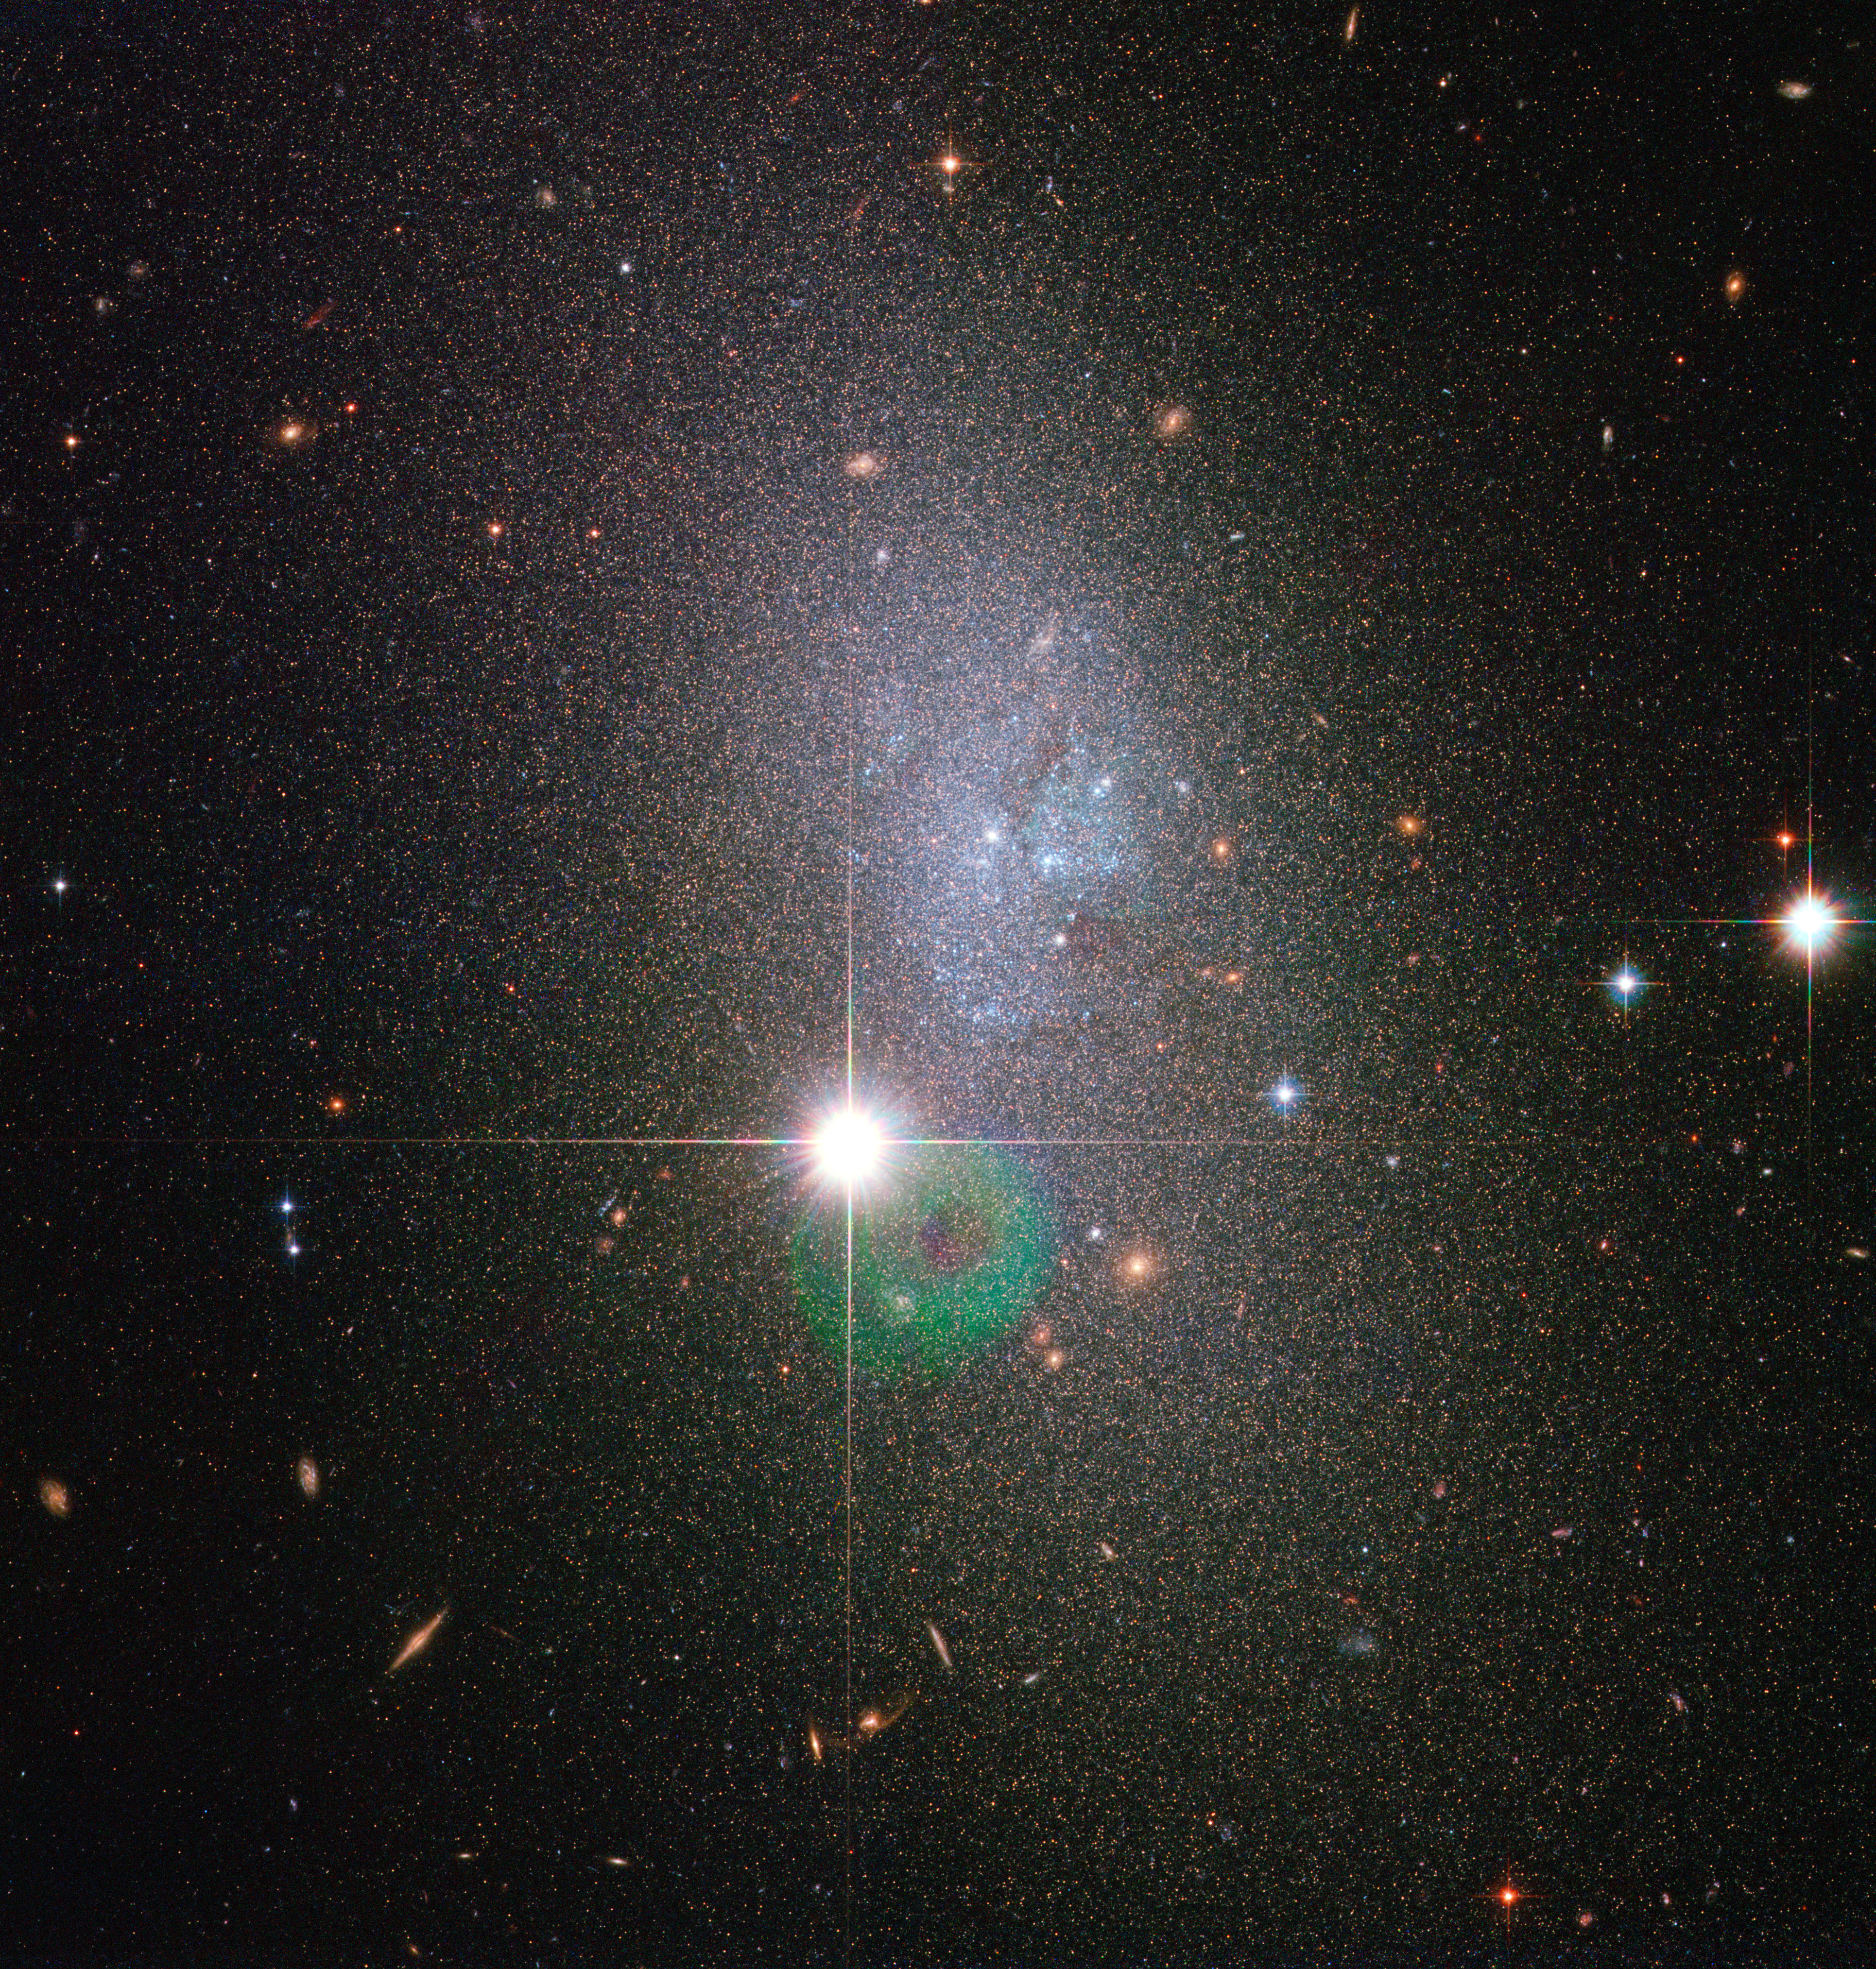

A vapour of stars

Relatively few galaxies possess the sweeping, luminous spiral arms or brightly glowing centre of our home galaxy the Milky Way. In fact, most of the Universe's galaxies look like small, amorphous clouds of vapour. One of these galaxies is DDO 82, captured here in an image from the NASA/ESA Hubble Space Telescope. Though tiny compared to the Milky Way, such dwarf galaxies still contain between a few million and a few billion stars.

DDO 82, also known by the designation UGC 5692, is not without a hint of structure, however. Astronomers classify it as an Sm galaxy, or Magellanic spiral galaxy, named after the Large Magellanic Cloud, a dwarf galaxy that orbits the Milky Way. That galaxy, like DDO 82, is said to have one spiral arm.

In the case of DDO 82, gravitational interactions over its history seem to have discombobulated it so that this structure is not as evident as in the Large Magellanic Cloud. Accordingly, astronomers also refer to DDO 82 and others of a similar unshapely nature as dwarf irregular galaxies.

DDO 82 can be found in the constellation of Ursa Major (the Great Bear) approximately 13 million light-years away. The object is considered part of the M81 Group of around three dozen galaxies. DDO 82 gets its name from its entry number in the David Dunlap Observatory Catalogue. Canadian astronomer Sidney van den Bergh originally compiled this list of dwarf galaxies in 1959.

The image is made up of exposures taken in visible and infrared light by Hubble’s Advanced Camera for Surveys. The field of view is approximately 3.3 by 3.3 arcminutes.

Credit: ESA/Hubble & NASA